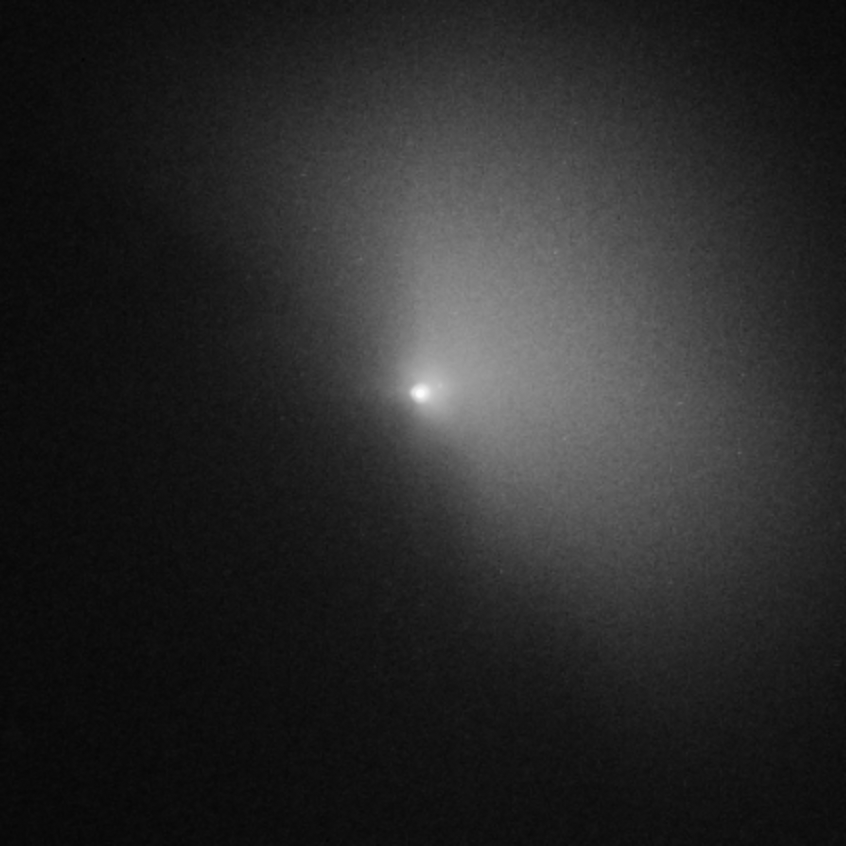

Hubble captures Deep Impact's collision with a comet (view 4h41 after impact)

In this photo, the cloud is 3,200 kilometres across.

Credit: NASA, ESA, P. Feldman (Johns Hopkins University), and H. Weaver (Johns Hopkins University Applied Physics Lab)